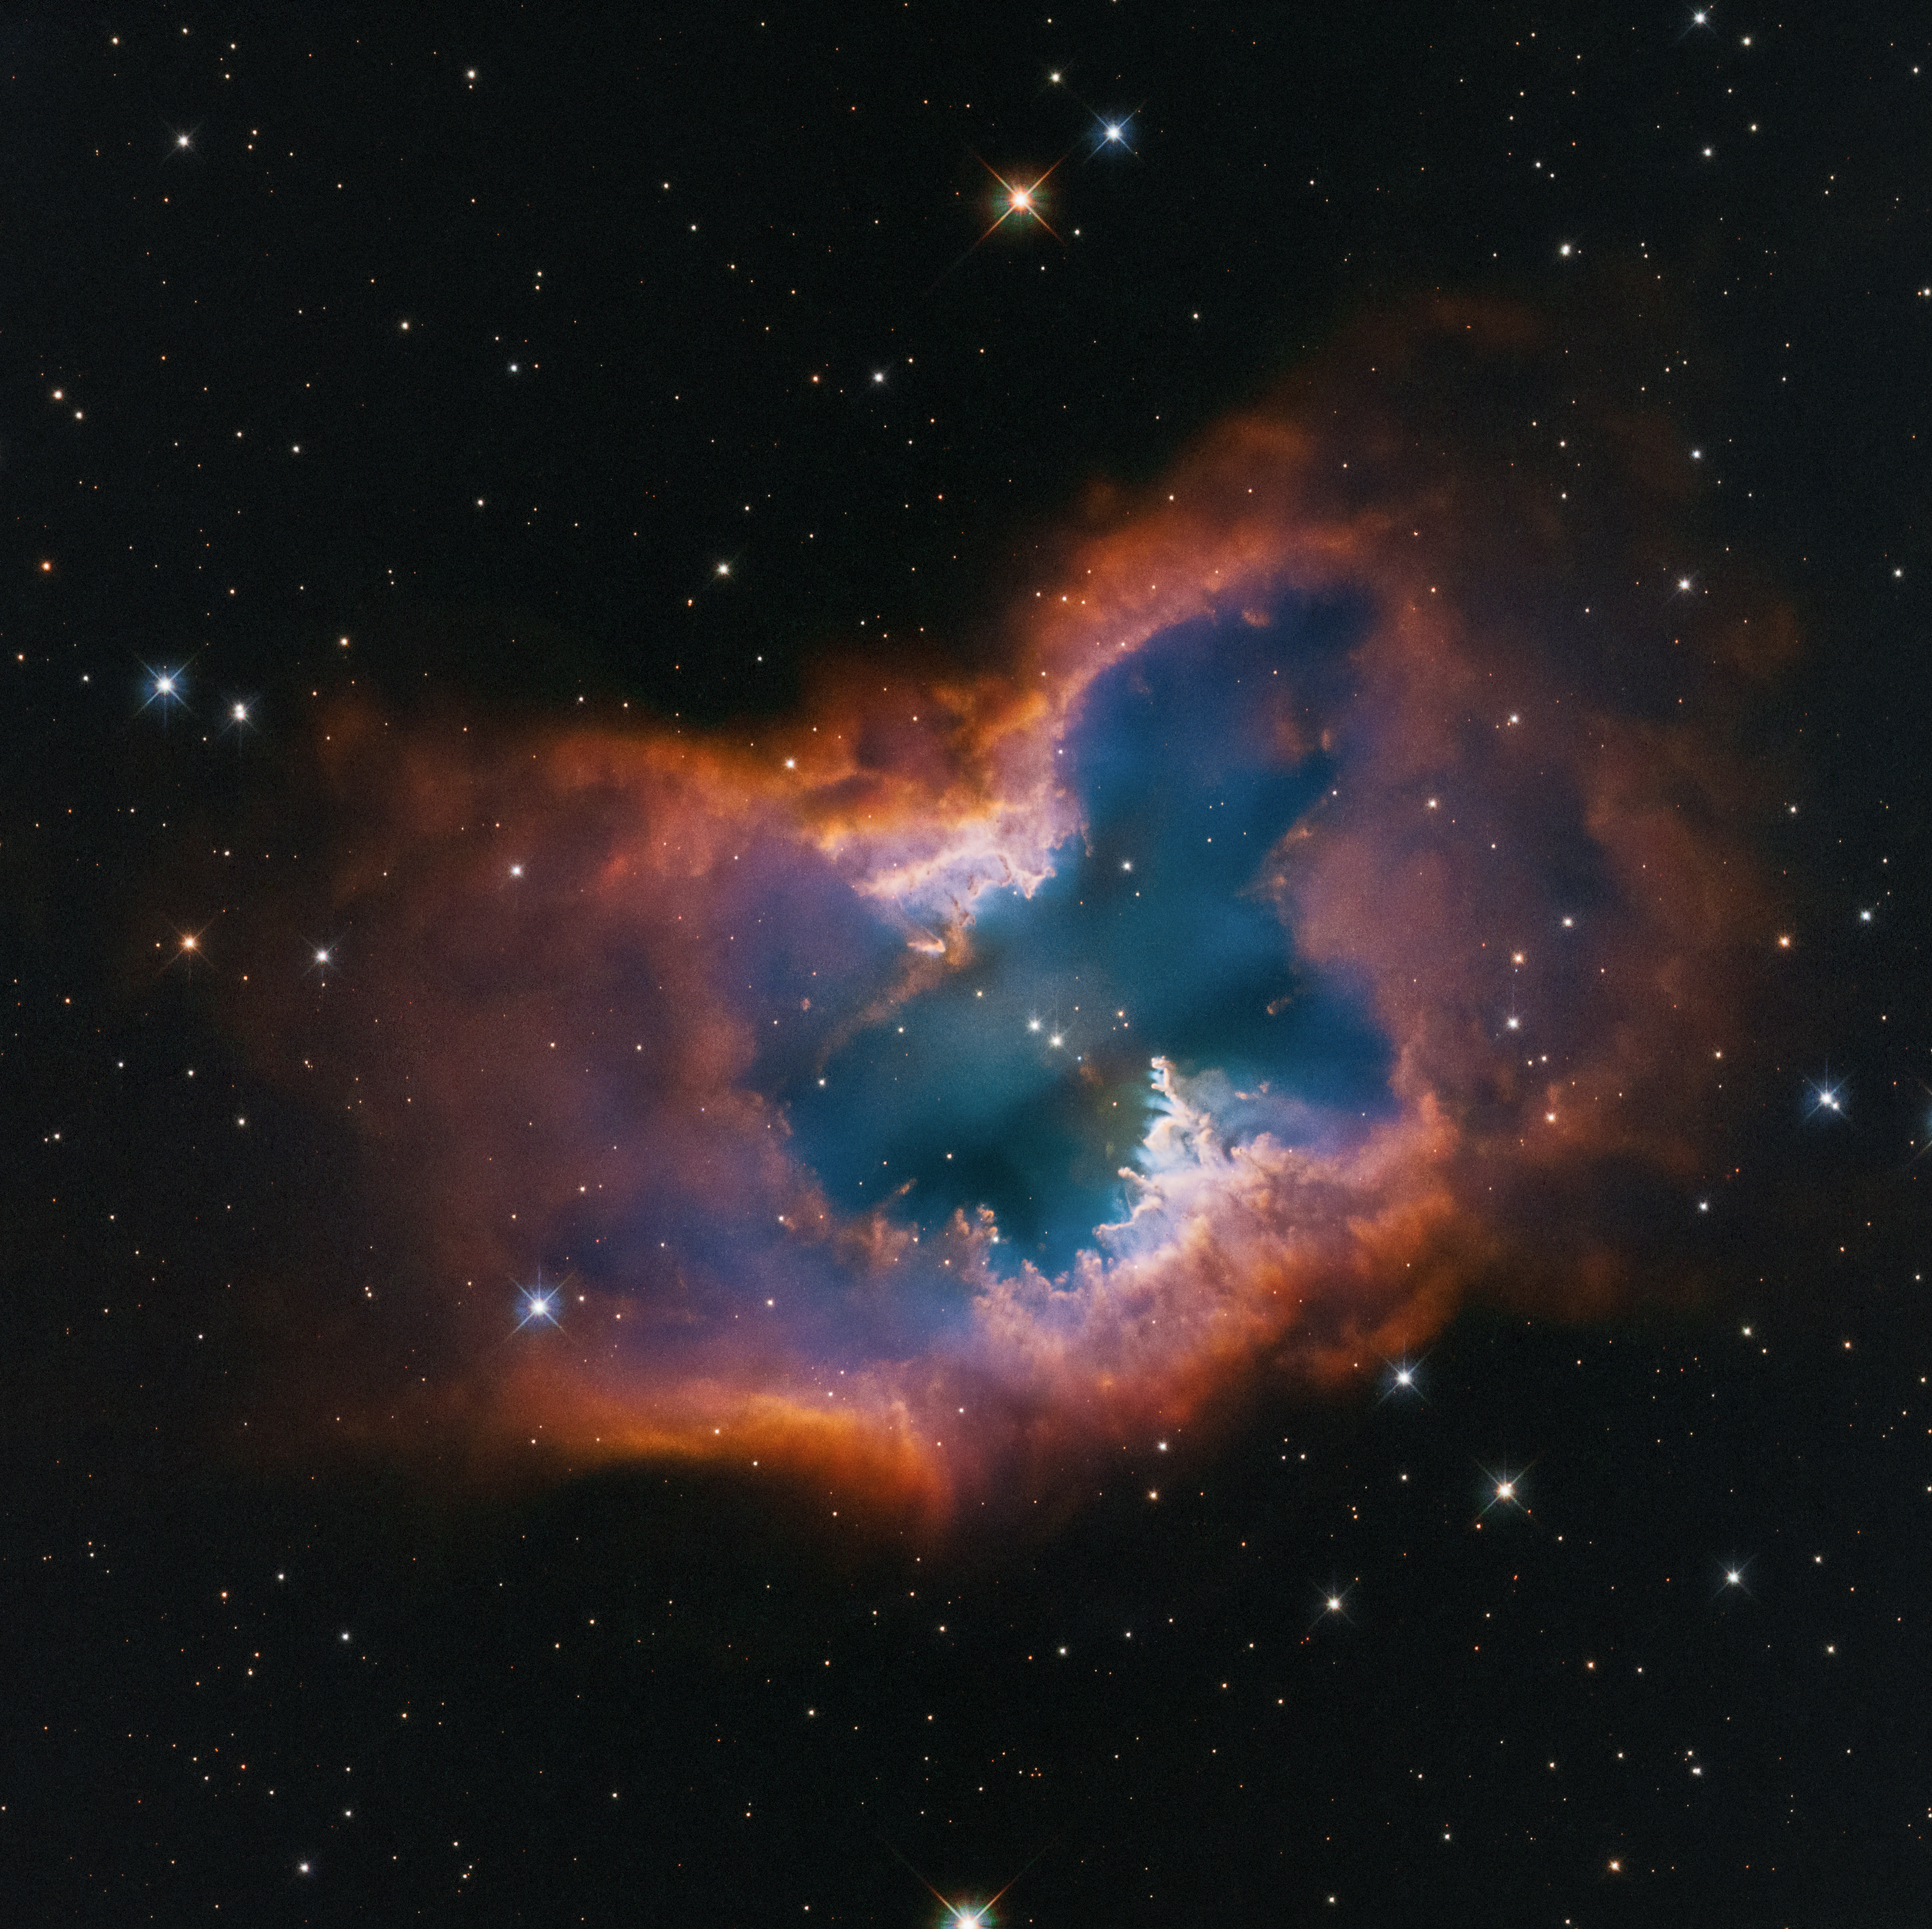

Planetary nebula NGC 2899

This Hubble Space Telescope image captures the beauty of the moth-like planetary nebula NGC 2899. This object has a diagonal, bipolar, cylindrical outflow of gas. This is propelled by radiation and stellar winds from a nearly 22 000 degree Celsius white dwarf at the center. In fact, there may be two companion stars that are interacting and sculpting the nebula, which is pinched in the middle by a fragmented ring or torus – looking like a half-eaten donut. It has a forest of gaseous “pillars” that point back to the source of radiation and stellar winds. The colours are from glowing hydrogen and oxygen. The nebula lies approximately 4,500 light-years away in the southern constellation Vela.

Credit: NASA, ESA, STScI